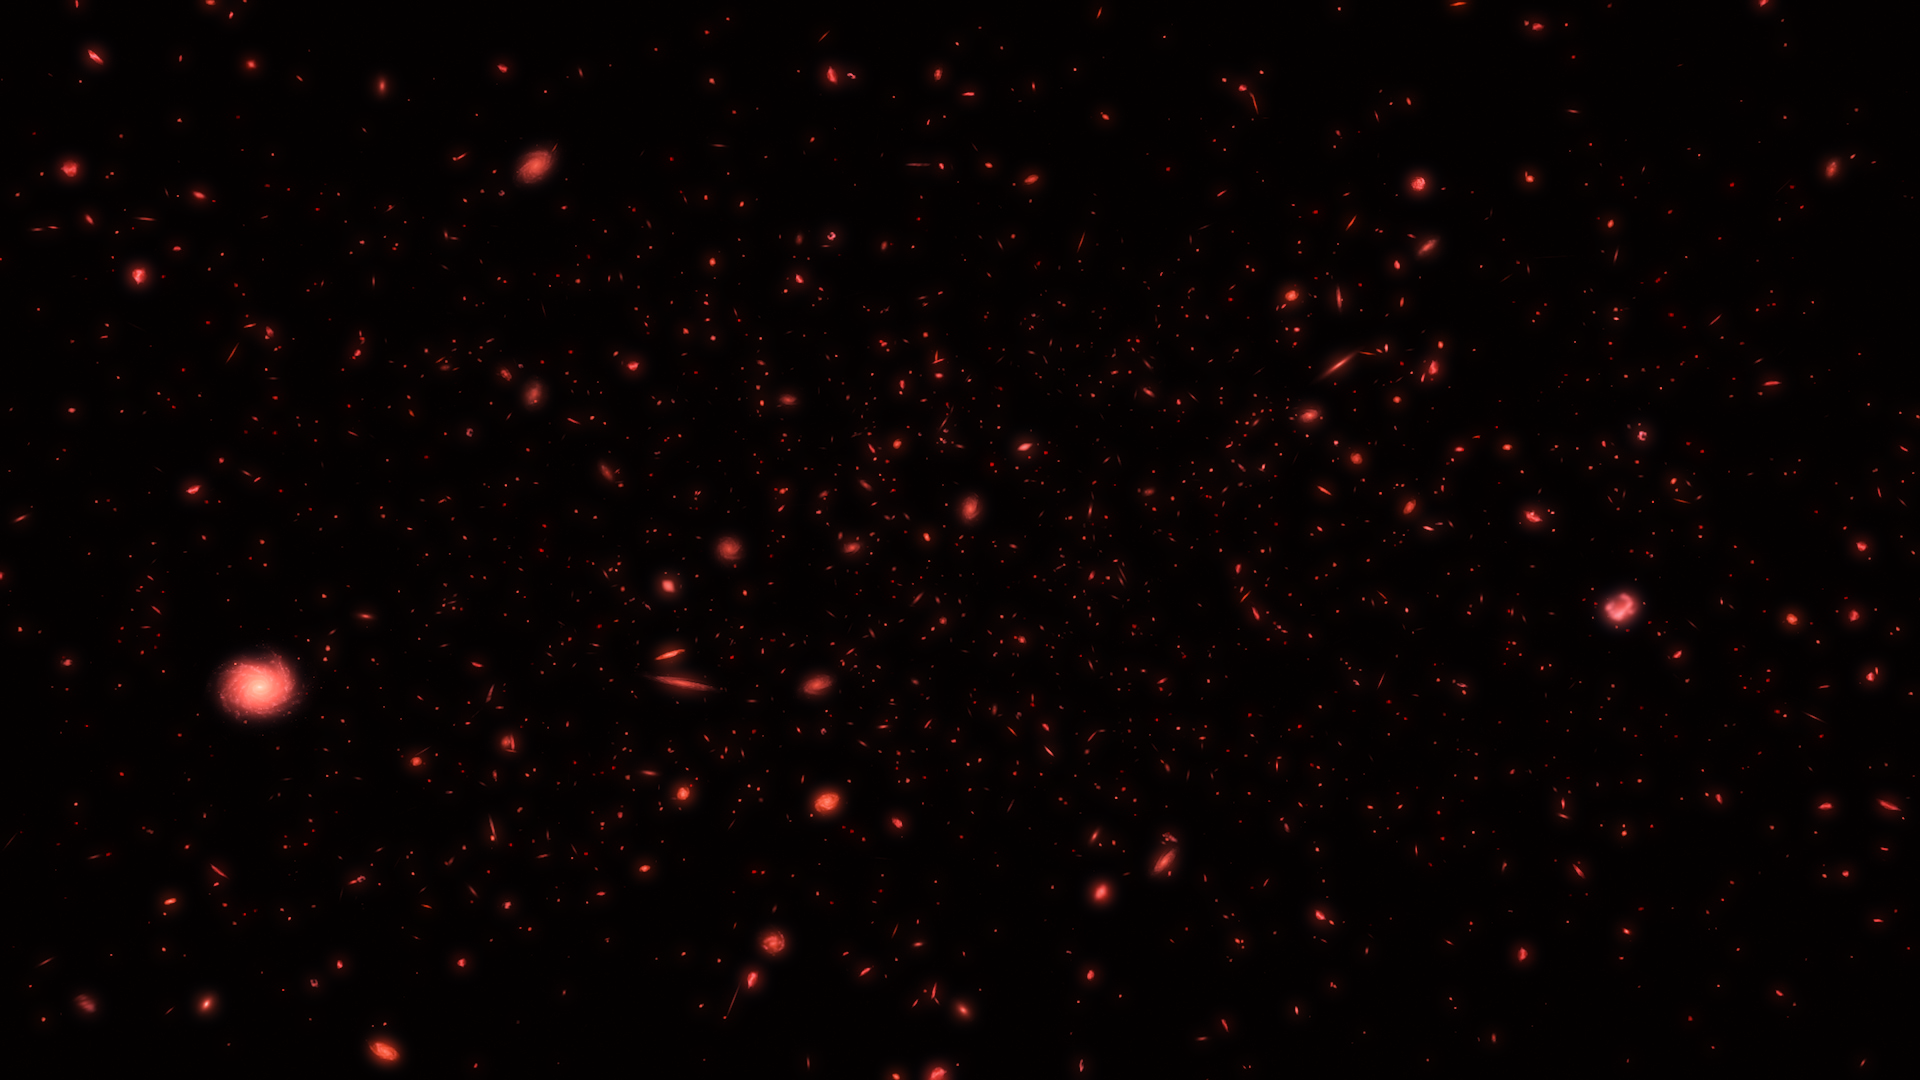

The Early Universe (artist’s impression)

New results from the NASA/ESA Hubble Space Telescope suggest the formation of the first stars and galaxies in the early Universe took place sooner than previously thought. A European team of astronomers have found no evidence of the first generation of stars, known as Population III stars, when the Universe was less than one billion years old.

This artist’s impression presents the early Universe.

Credit: ESA/Hubble, M. Kornmesser.